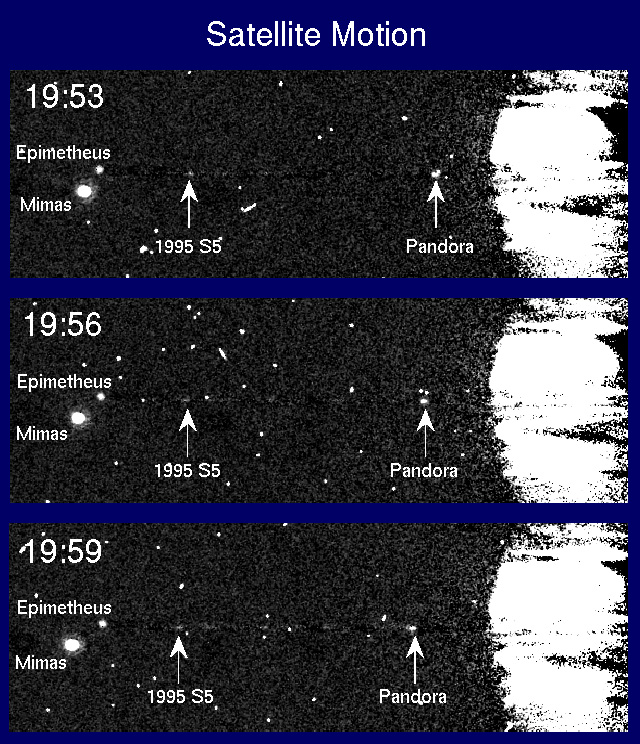

Motion of Saturn's satellites

This sequence of 100 sec exposures taken with HST's Wide Field and Planetary Camera (WFPC2) in planetary mode on 10 August 1995 shows three of the smaller satellites of Saturn, as well as the newly discovered object 1995S5. Epimetheus is the smaller co-orbital satellite and about 120 km in diameter, while 88 km diameter Pandorais the outer shepherd satellite of the narrow F Ring. 1995S5 appears as a faint smudge in the plane of the rings. The outward orbital motions of Pandora and 1995S5 are apparent, as are the displacements of Epimetheus and Mimas to the north and south of the ring plane, due to the slight inclinations of their orbits relative to Saturn's equator. The brightness of 1995S5 is consistent with an object of diameter 50 km or less.

These images were obtained approximately one hour before the Earth crossed Saturn's ring plane and an 8922 A methane band filter was usedto reduce the scattered light from the planet. An average of several earlier frames was subtracted from each image to remove the edge-on rings, and so reveal the fainter satellites. Some residual artifacts of this subtraction process are visible. Structure on the planet isdue to cloud features which changed position as the planet rotated. Unlabelled bright spots and streaks are due to cosmic ray hits on the detector.

Credit: Phil Nicholson (Cornell University), Mark Showalter (NASA/ESA-Ames/Stanford) and NASA/ESA